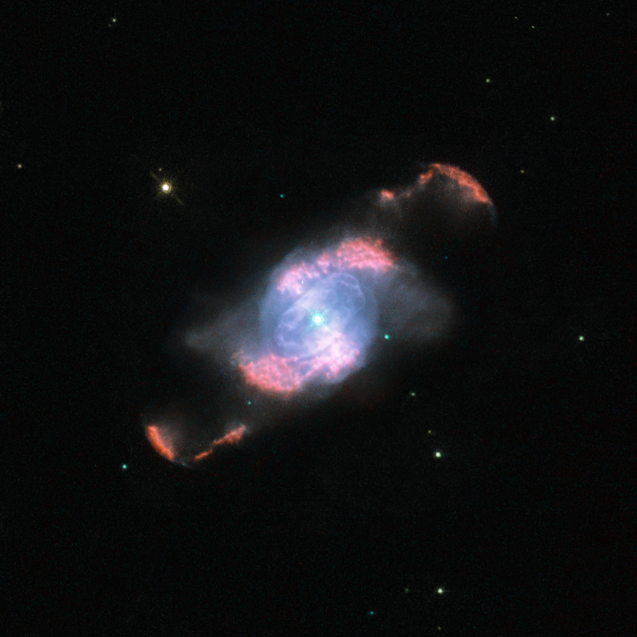

IC4634’s Glowing Waves

This striking Hubble image of the planetary nebula IC 4634 reveals two shining, S-shaped ejections from a dying star. This star, awash in glowing material at the centre of the picture, bloated as it aged and launched its outer layers off into space. The star’s very hot, exposed core has since beamed intense ultraviolet radiation at these lost shells of gas, making them glow in rich colours.

This process has been far from orderly or calm, however, as revealed by the distinct, separate waves of thrown-off gases. One is more distant and therefore was spewed first, followed by a more recently ejected tide of matter that formed the tighter S-shape. The result is remarkably symmetric on each side of the central star.

The NASA/ESA Hubble Space Telescope’s Wide Field Planetary Camera 2 (WFPC2) captured this image of IC 4634, which is found more than about 7500 light-years away in the constellation of Ophiuchus (the Serpent Holder). IC 4634 and other objects like it are known as planetary nebulae due to their appearance through early telescopes as rounded, faintly luminous discs similar to the distant planets Uranus and Neptune. The picture was created from images through five different filters (F487N, F502N, F574M, F656N and F658N) that captured light emitted by different elements in the gaseous features. The total aggregate exposure time was 4000 seconds and the field of view is just 29 arcseconds across.

Credit: ESA/Hubble and NASA.